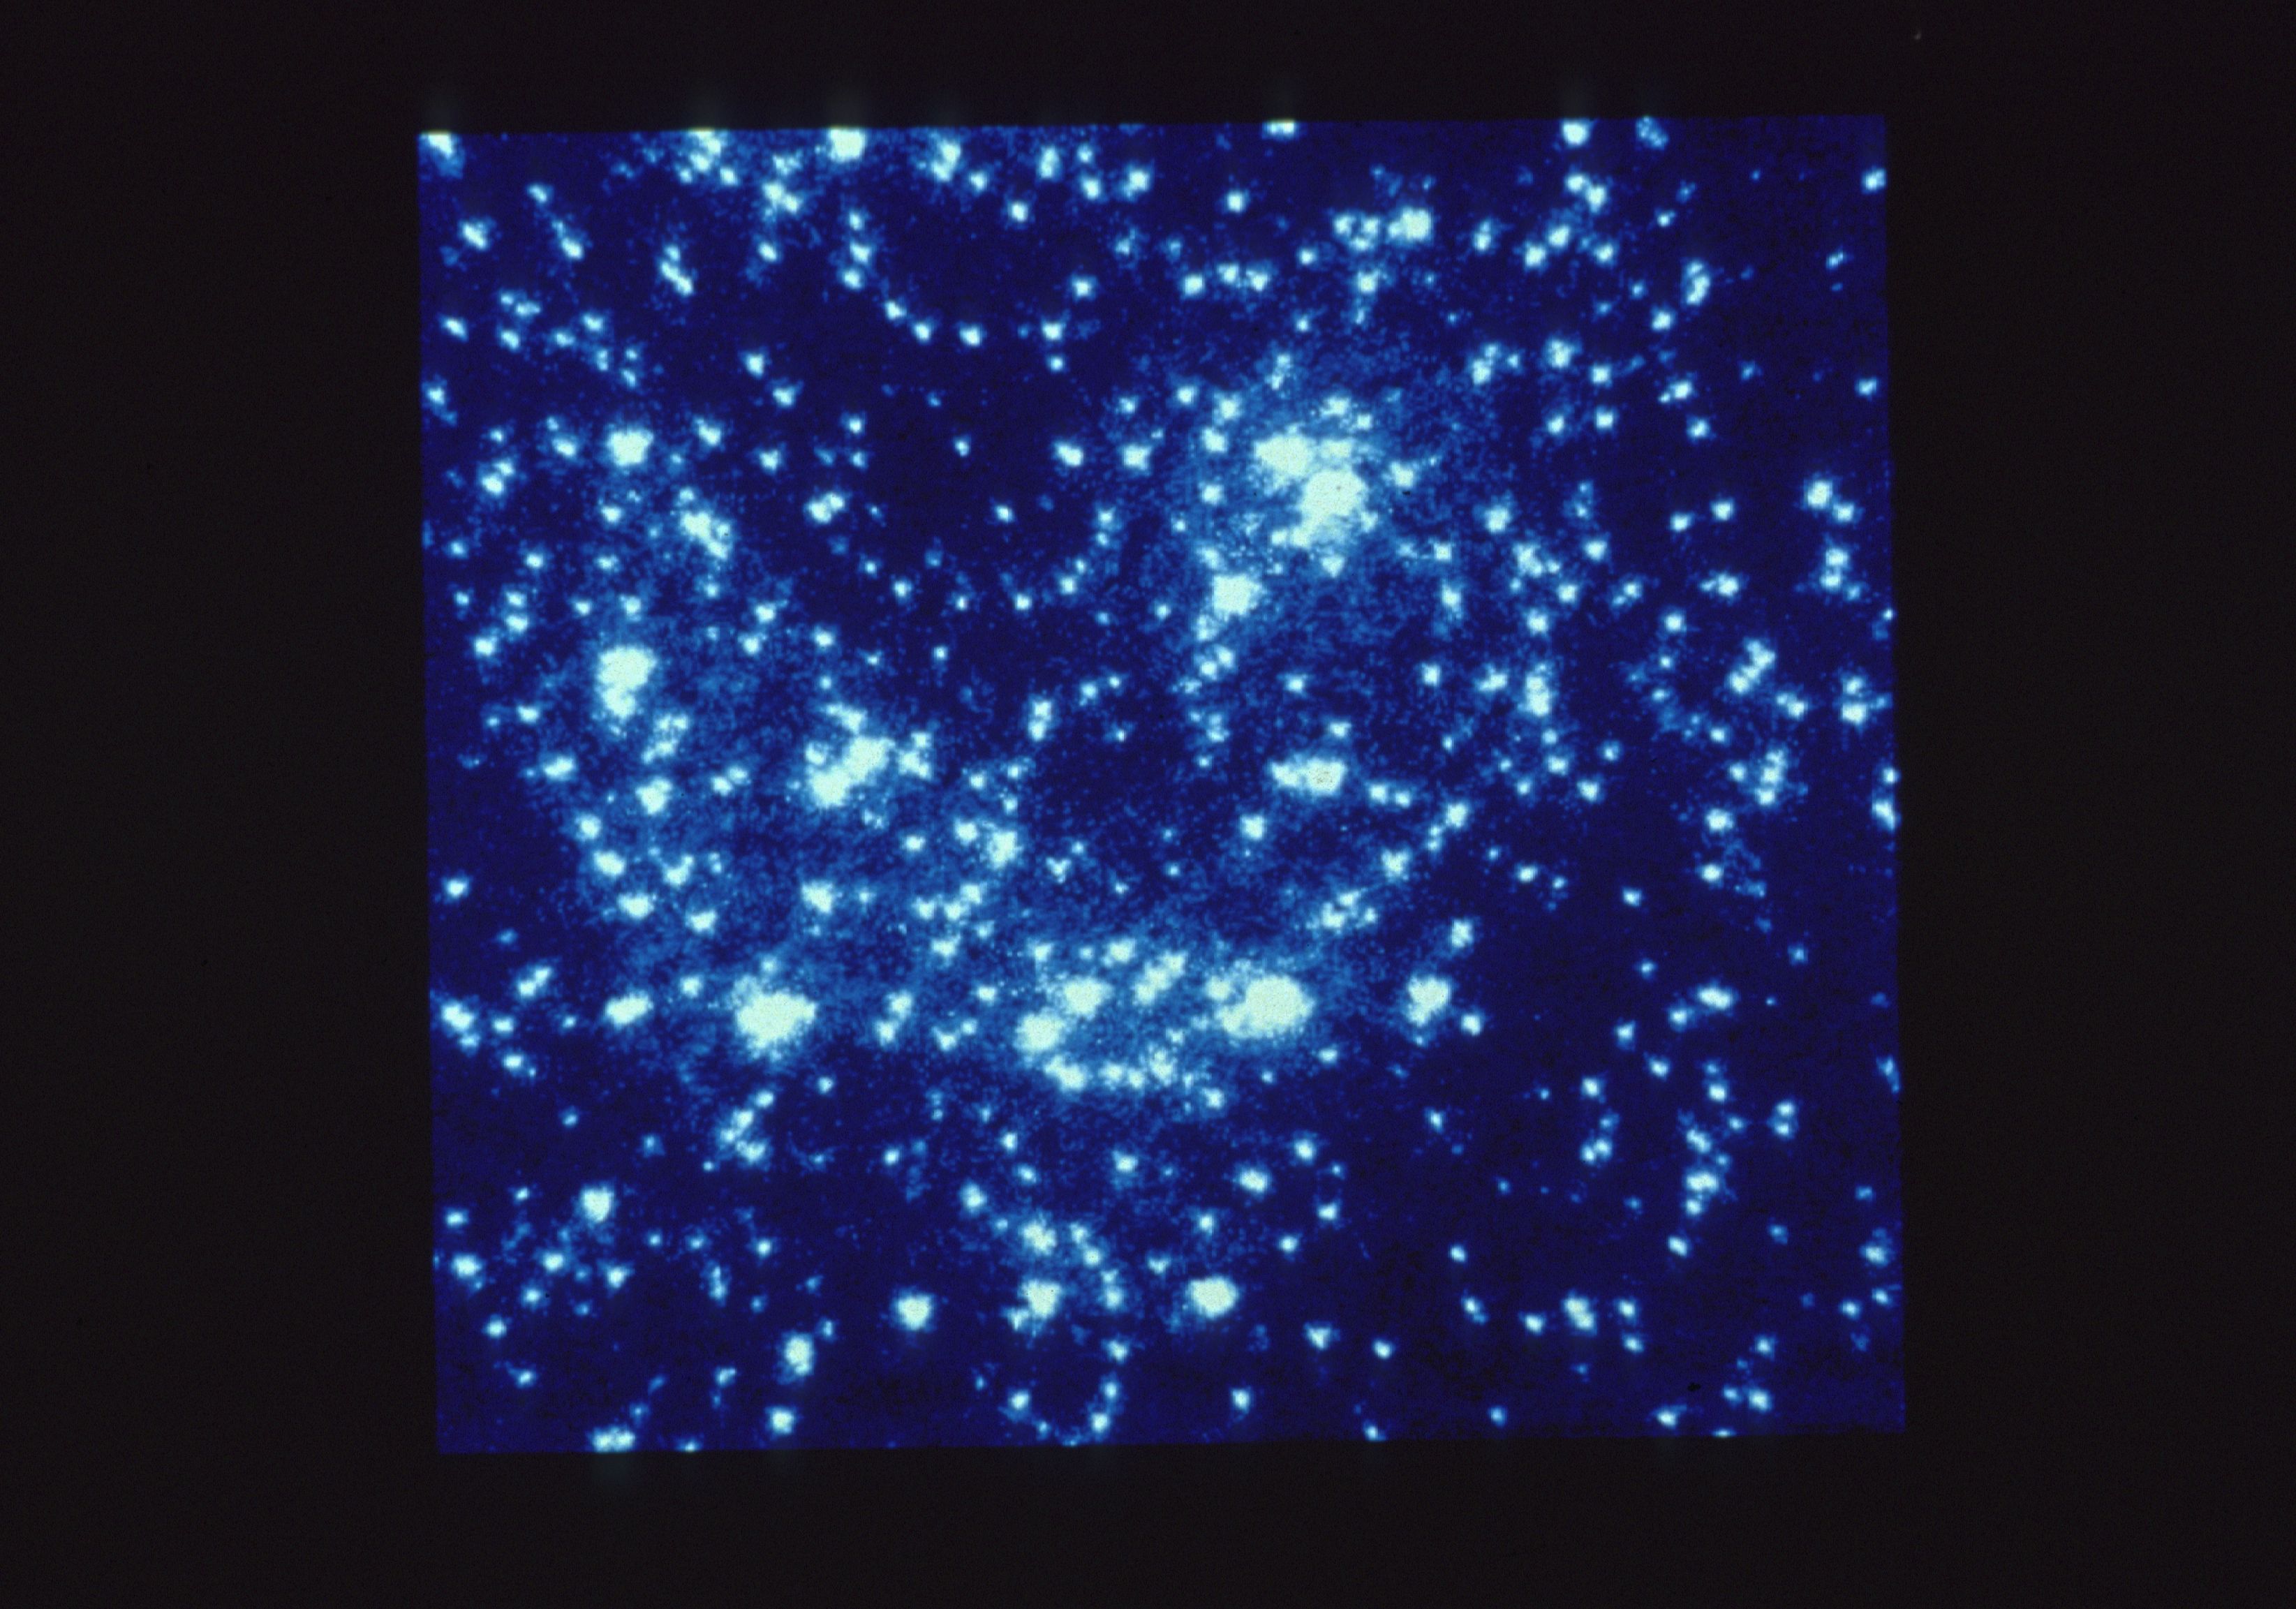

47 Tucanae core

The core of the globular cluster 47 Tucanae, as imaged by the European Space Agency's Faint Object Camera (FOC) onboard NASA/ESA Hubble Space Telescope. Space Telescope's high spatial resolution and ultraviolet sensitivity make it a powerful tool for probing the centers of globular clusters. The FOC resolves several hundred stars where ground-based images only yield a few dozen stars. At least 21 of these stars are exceptionally bright in ultraviolet light. HST's UV sensitivity and high resolution allow it to easily separate these so-called blue stragglers stars from the red giant stars which dominate the cluster.

Blue stragglers may evolve from "old age" back to a hotter and brighter youth through stellar collisions and mergers. This high concentration of blue stragglers towards the core of 47 Tucanae suggests they are significantly more massive than most of the cluster's stars. Some of blue stragglers could be massive because they are really double star systems. Such binary systems may influence the motions of thousands of other stars within the cluster.

Credit: Francesco Paresce (ESA/STScI). Michael Shara (STScI), Georges Meylan (ESA/STScI)